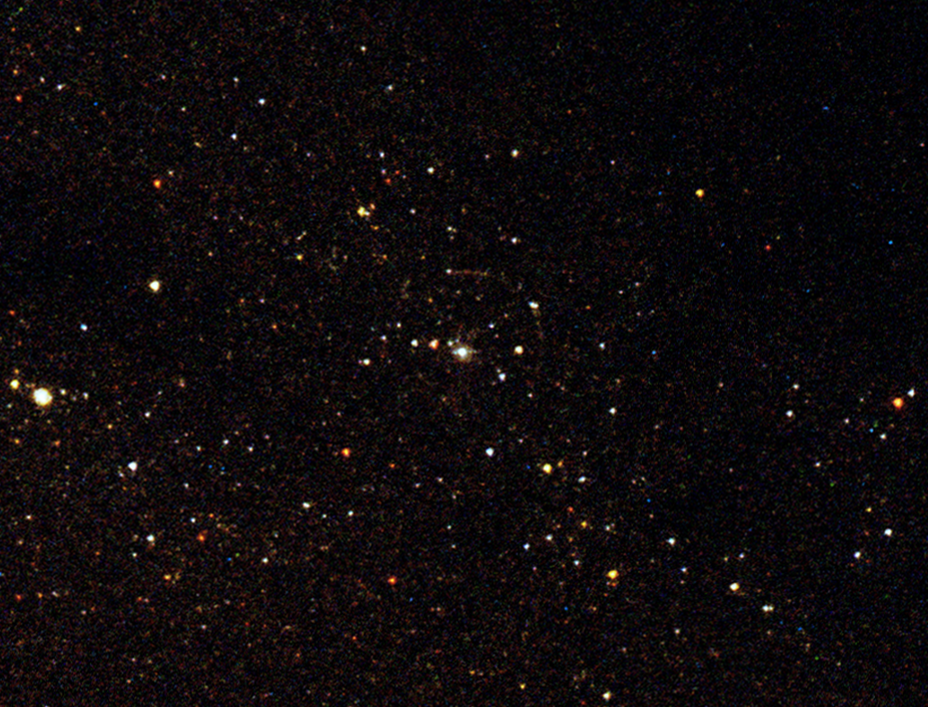

Close-up of the Supernova 1993J explosion site (ACS/HRC image)

This NASA/ESA Hubble Space Telescope image shows the area in Messier 81 where Supernova 1993J exploded. The companion to the supernova "mother star" that remains after the explosion is seen in the centre of the image.

The image is taken with Hubble's Advanced Camera for Surveys and is a combination of four exposures taken with ACS' High Resolution Camera. The exposures were taken through two near-UV filters (250W, 2100 seconds and 330W, 1200 seconds) shown in purple and blue, a deep blue filter (435W, 1000 seconds) shown in green and a green filter (555W, 1120 seconds) shown in red.

The quarter-circle around the supernova companion is a so-called light echo originating from sheets of dust in the galaxy reflecting light from the original supernova explosion. The timing of the appearance of these echoes can be used to map out the dust structure around the supernova. The light echo was detected in late 2002 and early 2003 by two competing groups of scientists.

Credit: ESA and Justyn R. Maund (University of Cambridge)